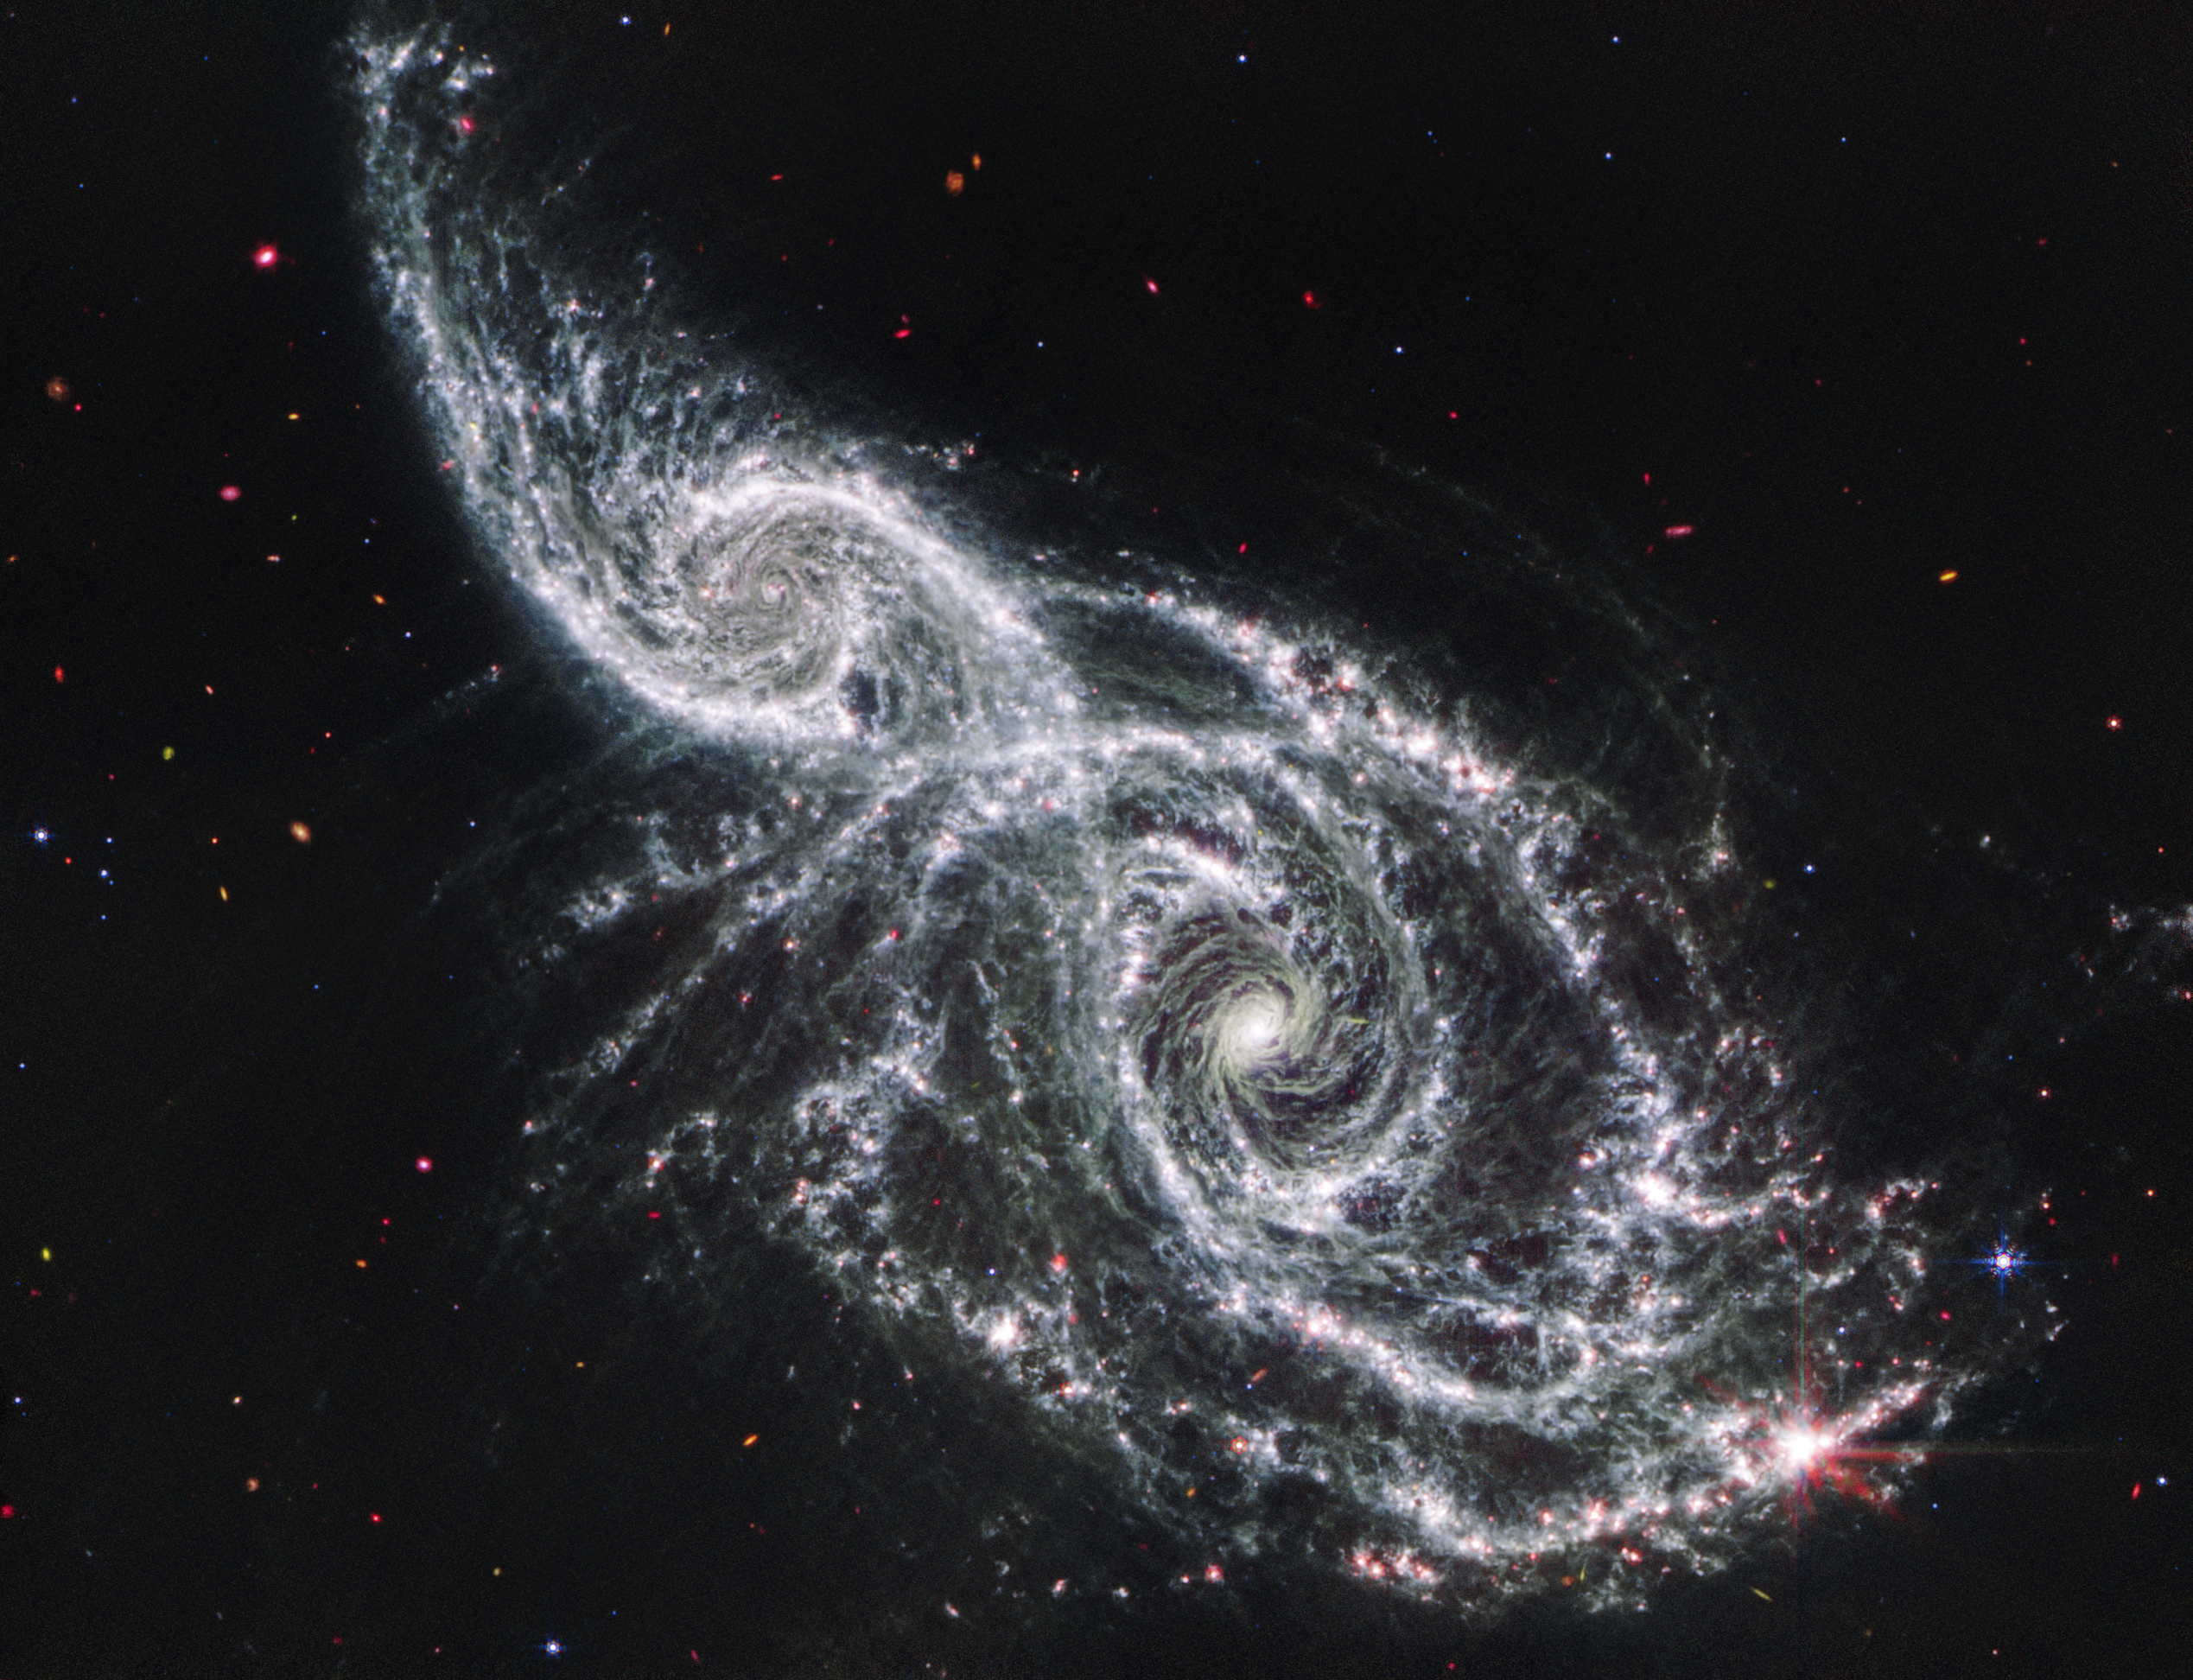

Galaxies IC 2163 and NGC 2207 (Webb MIRI image)

The James Webb Space Telescope’s mid-infrared image of galaxies IC 2163 and NGC 2207 recalls the iciness of long-dead bones mixed with eerie vapours. Two large luminous ‘eyes’ lie at the galaxies’ cores, and gauzy spiral arms reach out into the vast distances of space.

Webb’s mid-infrared image excels at showing where the cold dust glows throughout these galaxies — and helps pinpoint where stars and star clusters are buried within the dust. Find these regions by looking for the pink dots along the spiral arms. Many of these areas are home to actively forming stars that are still encased in the gas and dust that feeds their growth. Other pink dots may be objects that lie well behind these galaxies, including extremely distant active supermassive black holes known as quasars.

The largest, brightest pink region that glimmers with eight prominent diffraction spikes at the bottom right is a mini starburst — a location where many stars are forming in quick succession. Find the lace-like holes in the spiral arms. These areas are brimming with star formation.

Finally, scan the black background of space, where objects shine brightly in a rainbow of colours. Blue circles with tiny diffraction spikes are foreground stars. Objects without spikes are very distant galaxies.

Credit: NASA, ESA, CSA, STScI